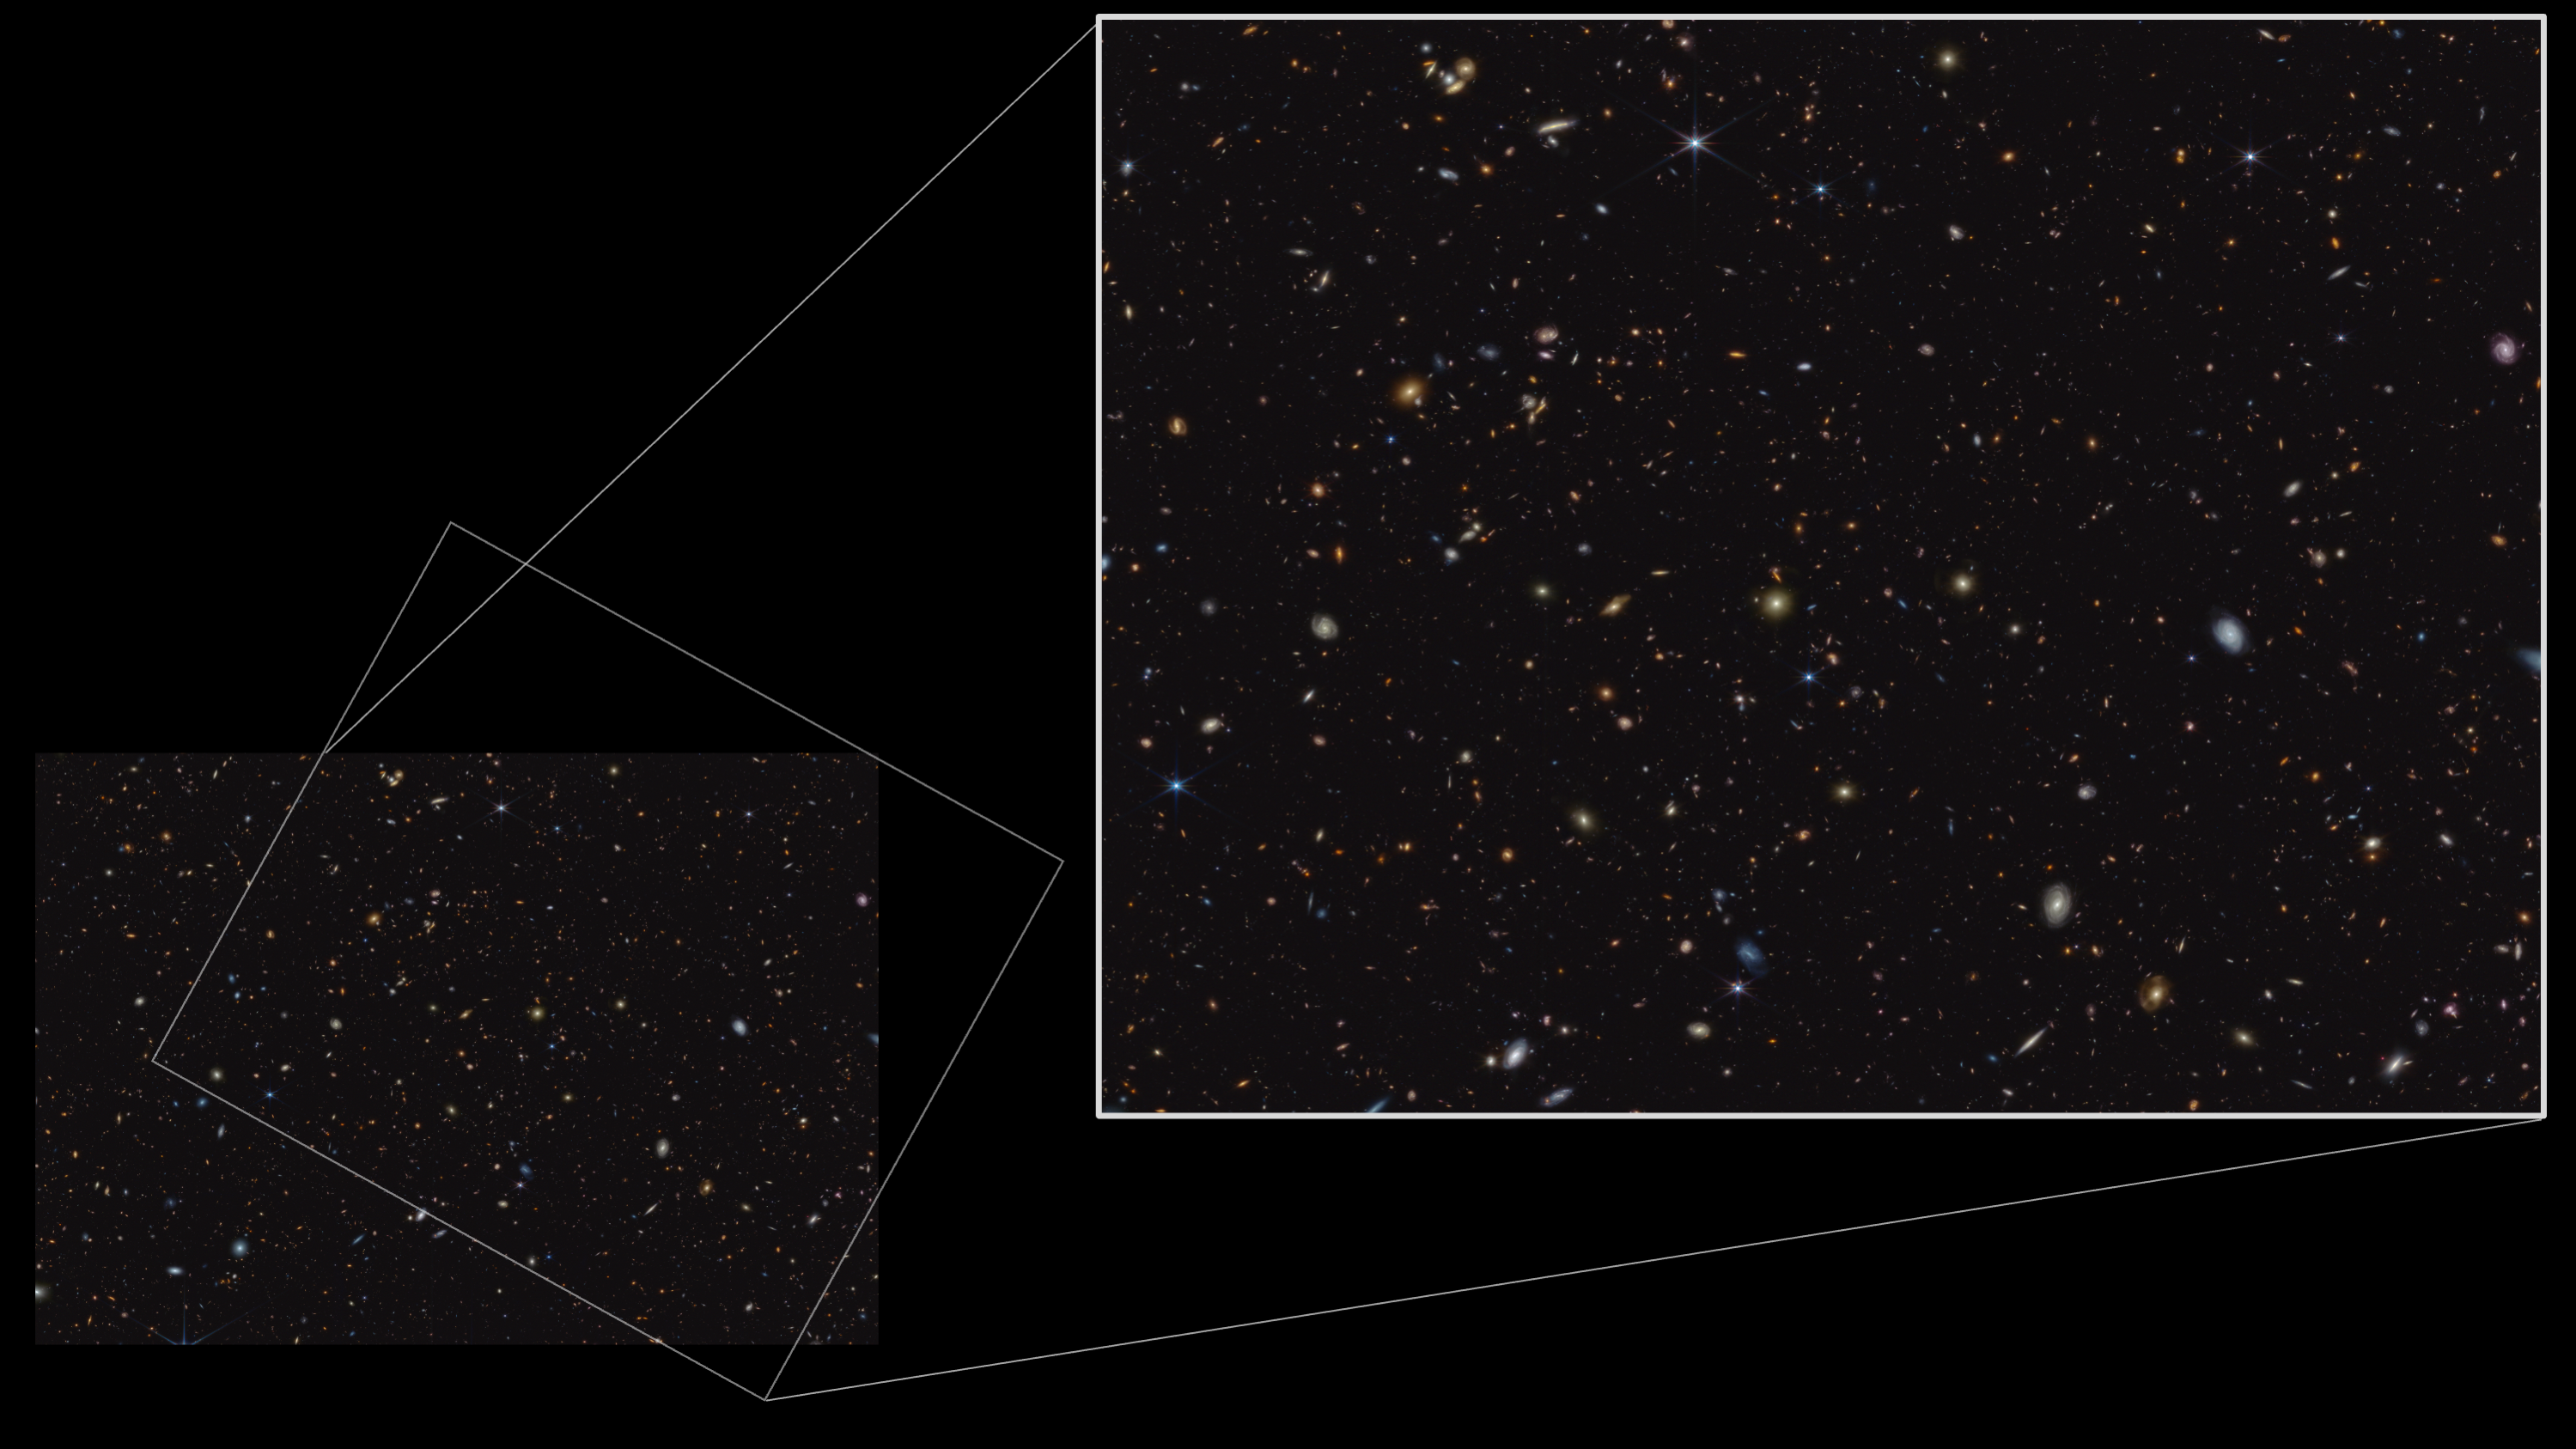

Area of study in GOODS-S field: JADES (NIRCam image)

One of the largest programmes in the first year of science with the NASA/ESA/CSA James Webb Space Telescope was the JWST Advanced Deep Extragalactic Survey, or JADES, which devoted about 32 days of telescope time to uncovering and characterising faint, distant galaxies.

The infrared image shown here in the bottom left was taken as part of the JADES programme and shows a portion of an area of the sky known as GOODS-South. This region has been well studied by the NASA/ESA Hubble Space Telescope and other observatories. More than 45 000 galaxies are visible here.

The pullout in the upper right shows a crop of this region, which was the focus area of Webb study for an international team of astronomers, who have observed the chemical signature of carbon-rich dust grains at redshift ~7. This is roughly equivalent to one billion years after the birth of the Universe. Similar observational signatures have been observed in the much more recent Universe, attributed to complex, carbon-based molecules known as polycyclic aromatic hydrocarbons (PAHs). It is not thought likely, however, that PAHs would have developed within the first billion years of cosmic time. Therefore, this observation suggests the exciting possibility that Webb may have observed a different species of carbon-based molecule: possibly minuscule graphite- or diamond-like grains produced by the earliest stars or supernovae. This observation suggests exciting avenues of investigation into both the production of cosmic dust and the earliest stellar populations in our Universe, and was made possible by Webb’s unprecedented sensitivity.

In this image, blue, green, and red were assigned to Webb’s NIRCam (Near-Infrared Camera) data at 0.9, 1.15, and 1.5 microns; 2.0, 2.77, and 3.55 microns; and 3.56, 4.1, and 4.44 microns (F090W, F115W, and F150W; F200W, F277W, and F335M; and F356W, F410M, and F444W), respectively.

Credit: ESA/Webb, NASA, ESA, CSA, B. Robertson (UC Santa Cruz), B. Johnson (Center for Astrophysics, Harvard & Smithsonian), S. Tacchella (University of Cambridge, M. Rieke (Univ. of Arizona), D. Eisenstein (Center for Astrophysics, Harvard & Smithsonian), A. Pagan (STScI)